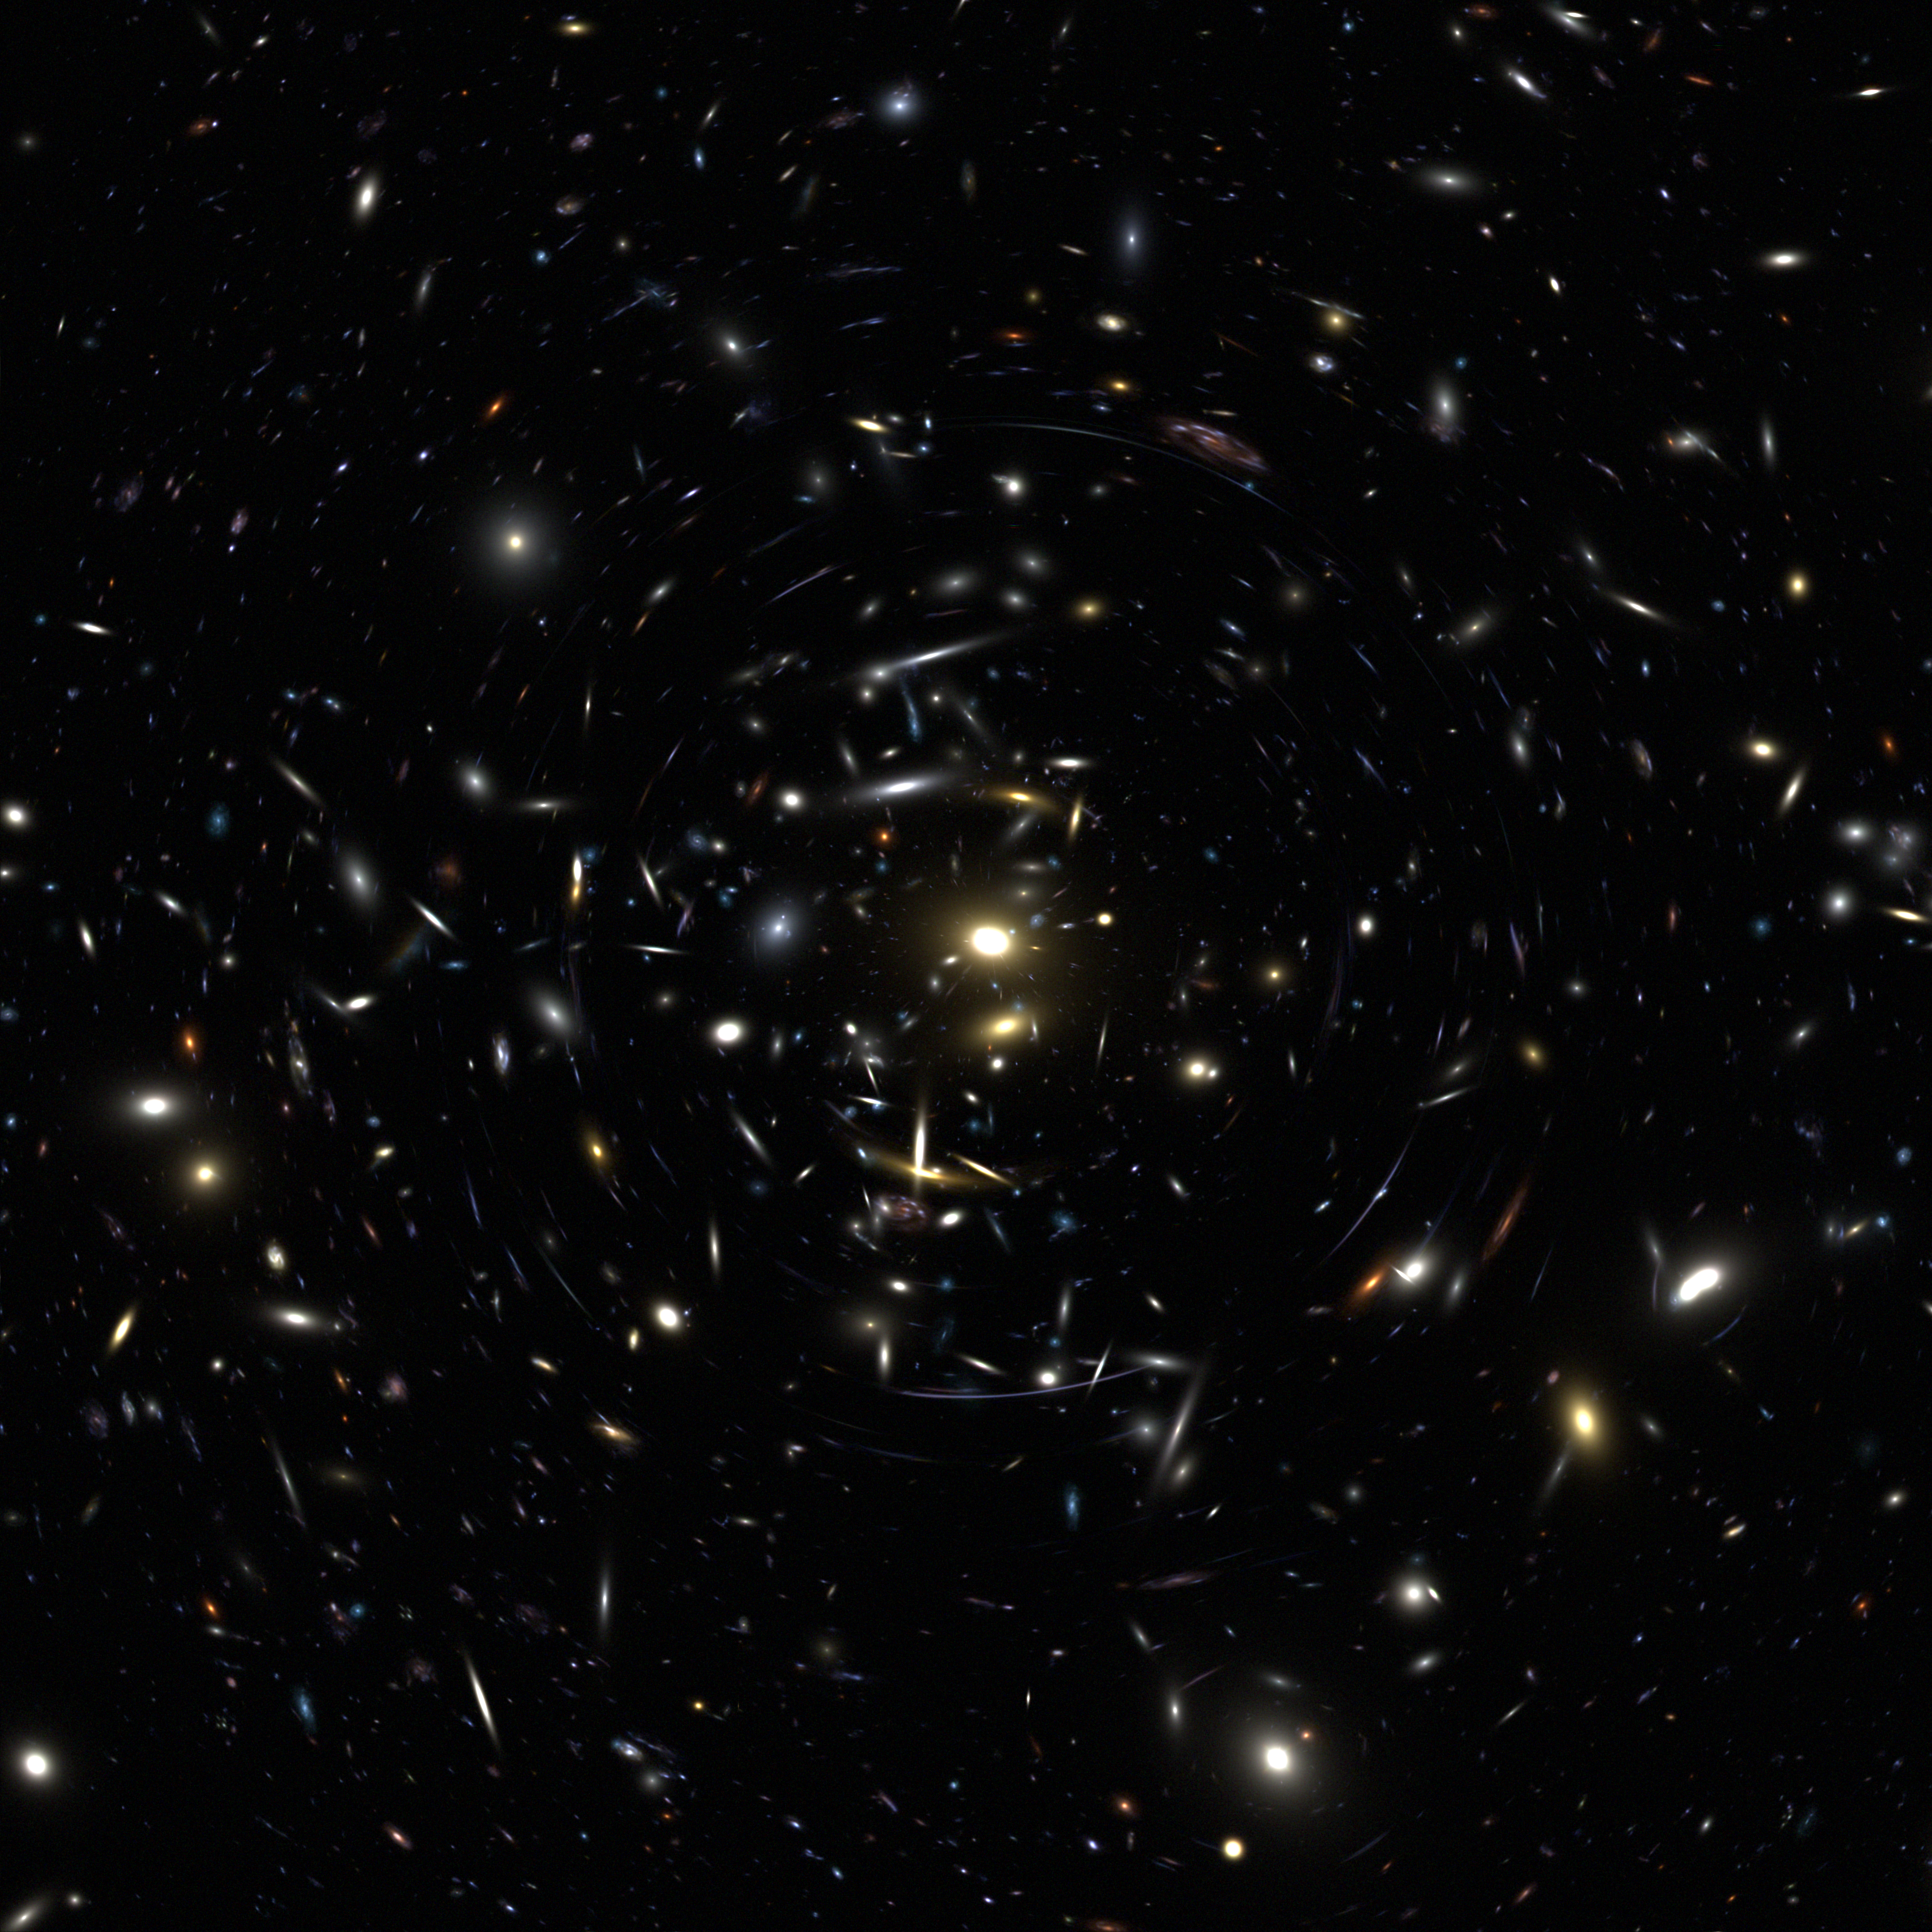

Advanced camera for surveys (simulation)

The Wide Field and Planetary Camera 2 provided the scientific community with astounding images and results. With the new Advanced Camera for Surveys (ACS) scientists are expecting to see even greater results that can help us to get a better understanding of the Universe.

This image is an illustration of how much the ACS will reveal.

Credit: NASA/ESA and the ACS Science Team